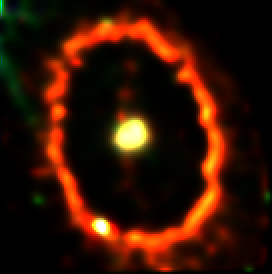

Supernova 1987a Ring

Recent Hubble telescope observations show a brightening knot on the upper right side of the ring. This is the site of a powerful collision between an outward moving blast wave and the innermost parts of the circumstellar ring. The collision heats the gas and has caused it to brighten in recent months. This is likely to be the first sign of a dramatic and violent collision that will take place over the next few years, rejuvenating SN1987A as a powerful source of X-ray and radio emissions.

Credit: Peter Garnavich (Harvard-Smithsonian Center for Astrophysics), andNASA/ESA